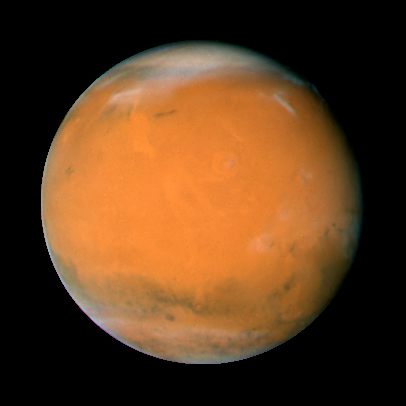

Mars on Dec. 3, 2007; longitude ~225 degrees

Mars observation taken Dec. 3, 2007; longitude ~225 degrees

Credit: NASA, ESA, the Hubble Heritage Team (STScI/AURA), J. Bell (Cornell University), and M. Wolff (Space Science Institute, Boulder)